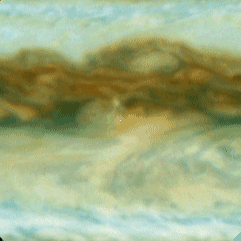

Galileo Probe Entry Site on Jupiter

This is one out of four enlarged Hubble images of Jupiter's equatorial region and it shows clouds sweeping across the predicted Galileo probe entry site, which is at the exact center of each frame (a small white dot has been inserted at the centered at the predicted entry site).

Credit: Reta Beebe (New Mexico State University), and NASA/ESA